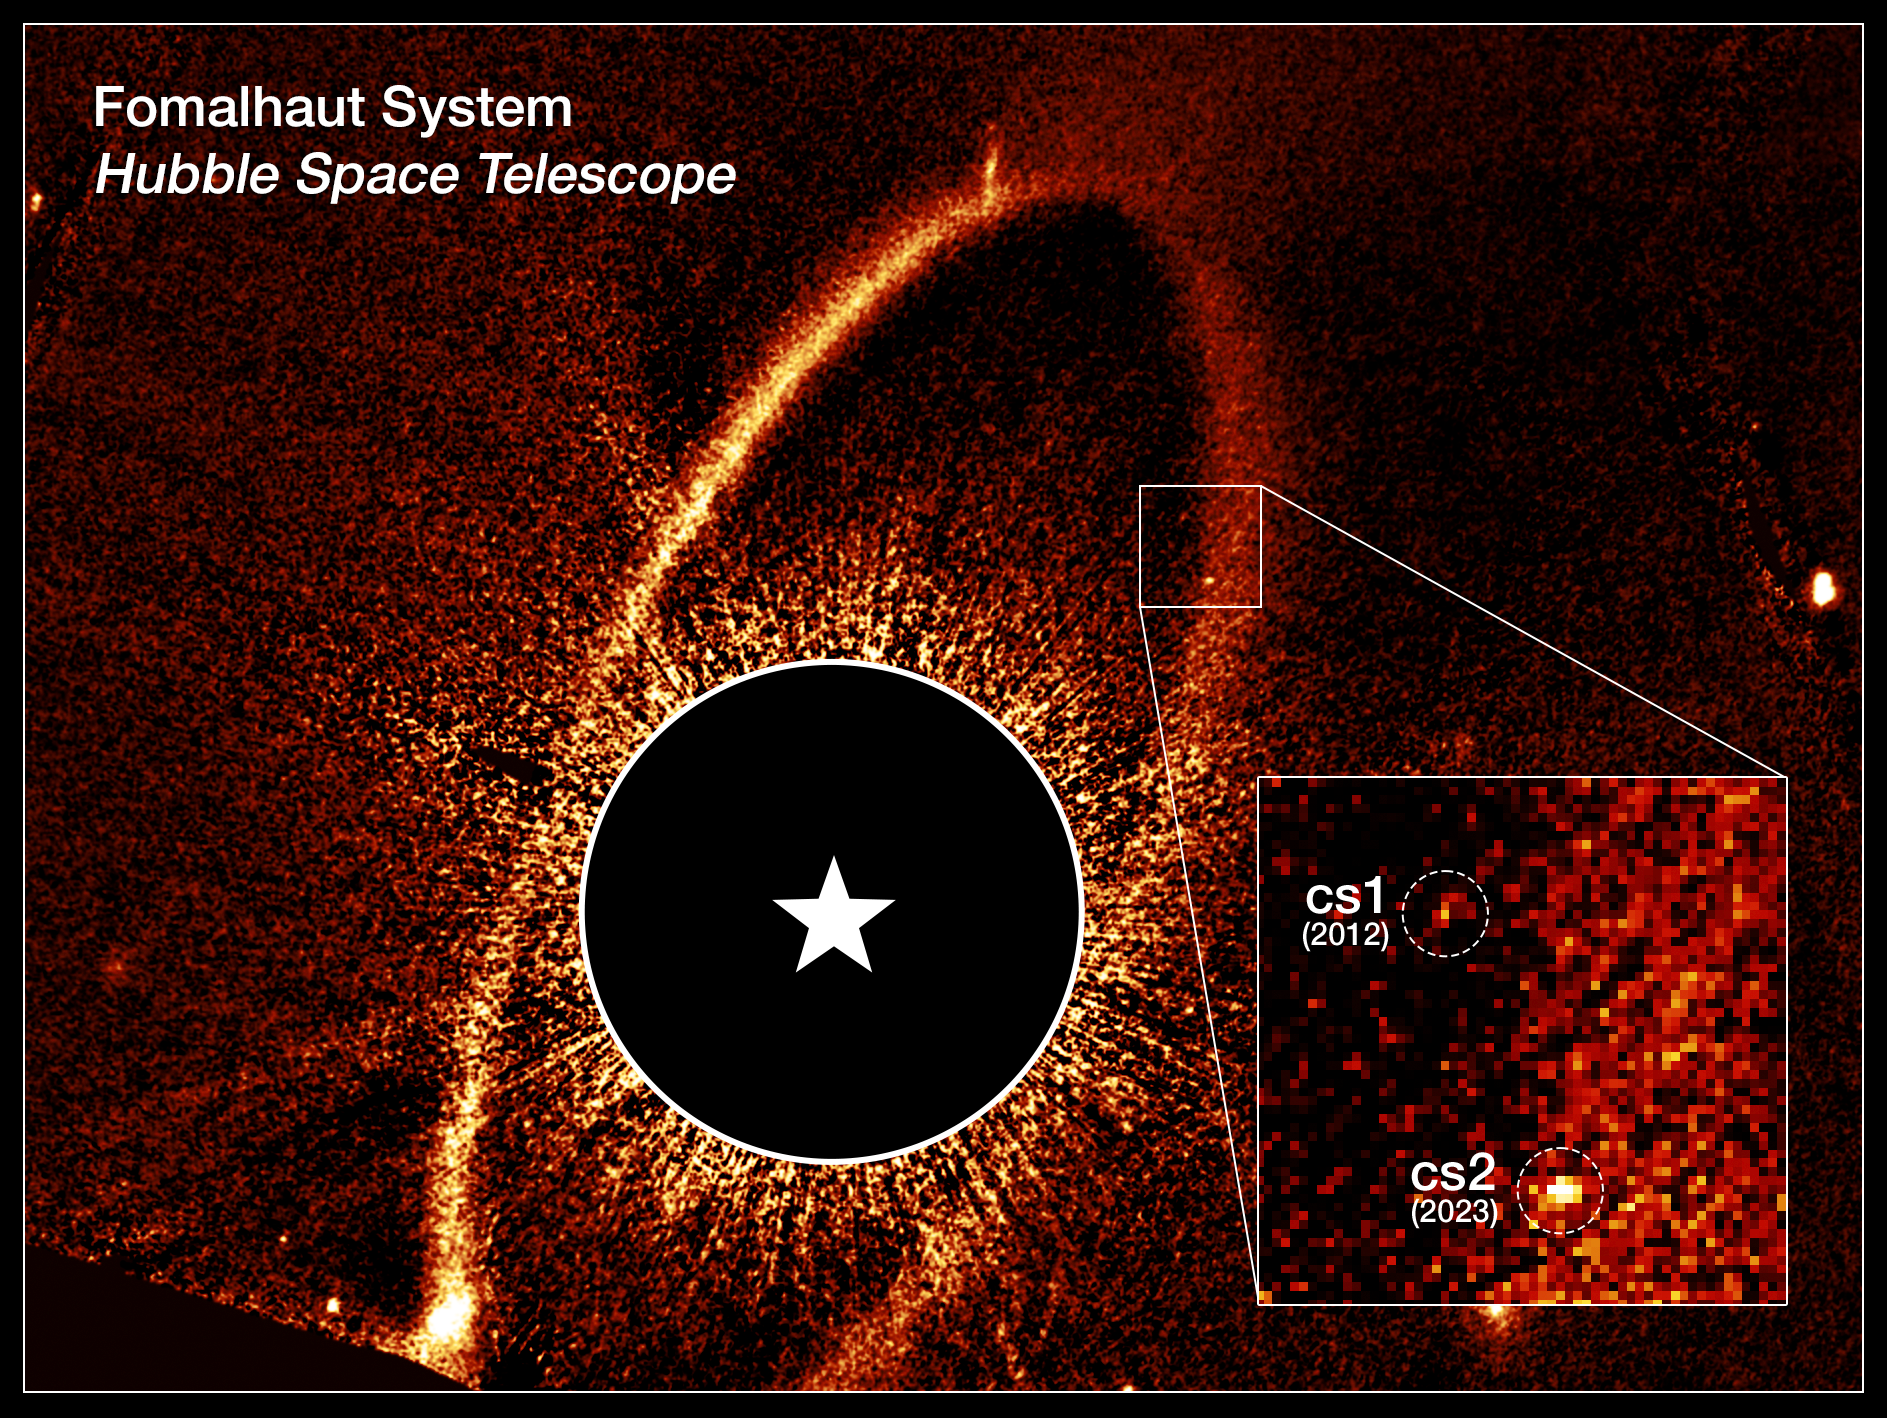

Fomalhaut cs1 and cs2 (annotated)

This composite NASA/ESA Hubble Space Telescope image shows the debris ring and dust clouds cs1 and cs2 around the star Fomalhaut. For comparison, dust cloud cs1, imaged in 2012, is pictured with dust cloud cs2, imaged in 2023. The dashed circles mark the location of these clouds. When dust cloud cs2 suddenly appeared, astronomers quickly noticed they had witnessed the violent collision of two massive objects. Previously thought to be a planet, cs1 is now classified as a similar debris cloud. In this image, Fomalhaut itself is masked out to allow the fainter features to be seen. Its location is marked by the white star.

This image was created from Hubble data from proposal #17139 (P. Kalas).

Credit: NASA, ESA, P. Kalas (UC Berkeley), J. DePasquale (STScI)